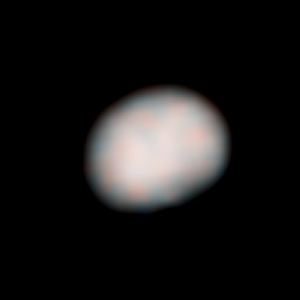

Vesta - HST - 83° longitude

Vesta - HST - 83° longitude

Credit: NASA, ESA, J.-Y. Li (University of Maryland, College Park), and L. McFadden (NASA/GSFC)